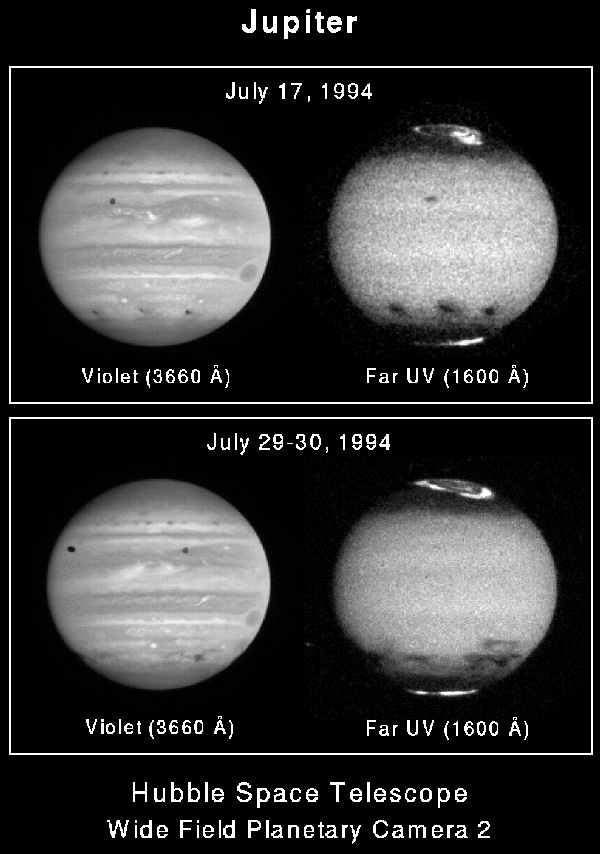

Auroral emmision arcs

This far-ultraviolet image of Jupiter taken with NASA/ESA Hubble Space Telescope (HST) shows narrow auroral 'arcs' that appeared at northern mid-latitudes following the impact of the K nucleus fragment of comet P/Shoemaker-Levy 9.

Credit: John T. Clarke (U. of Michigan), and NASA/ESA